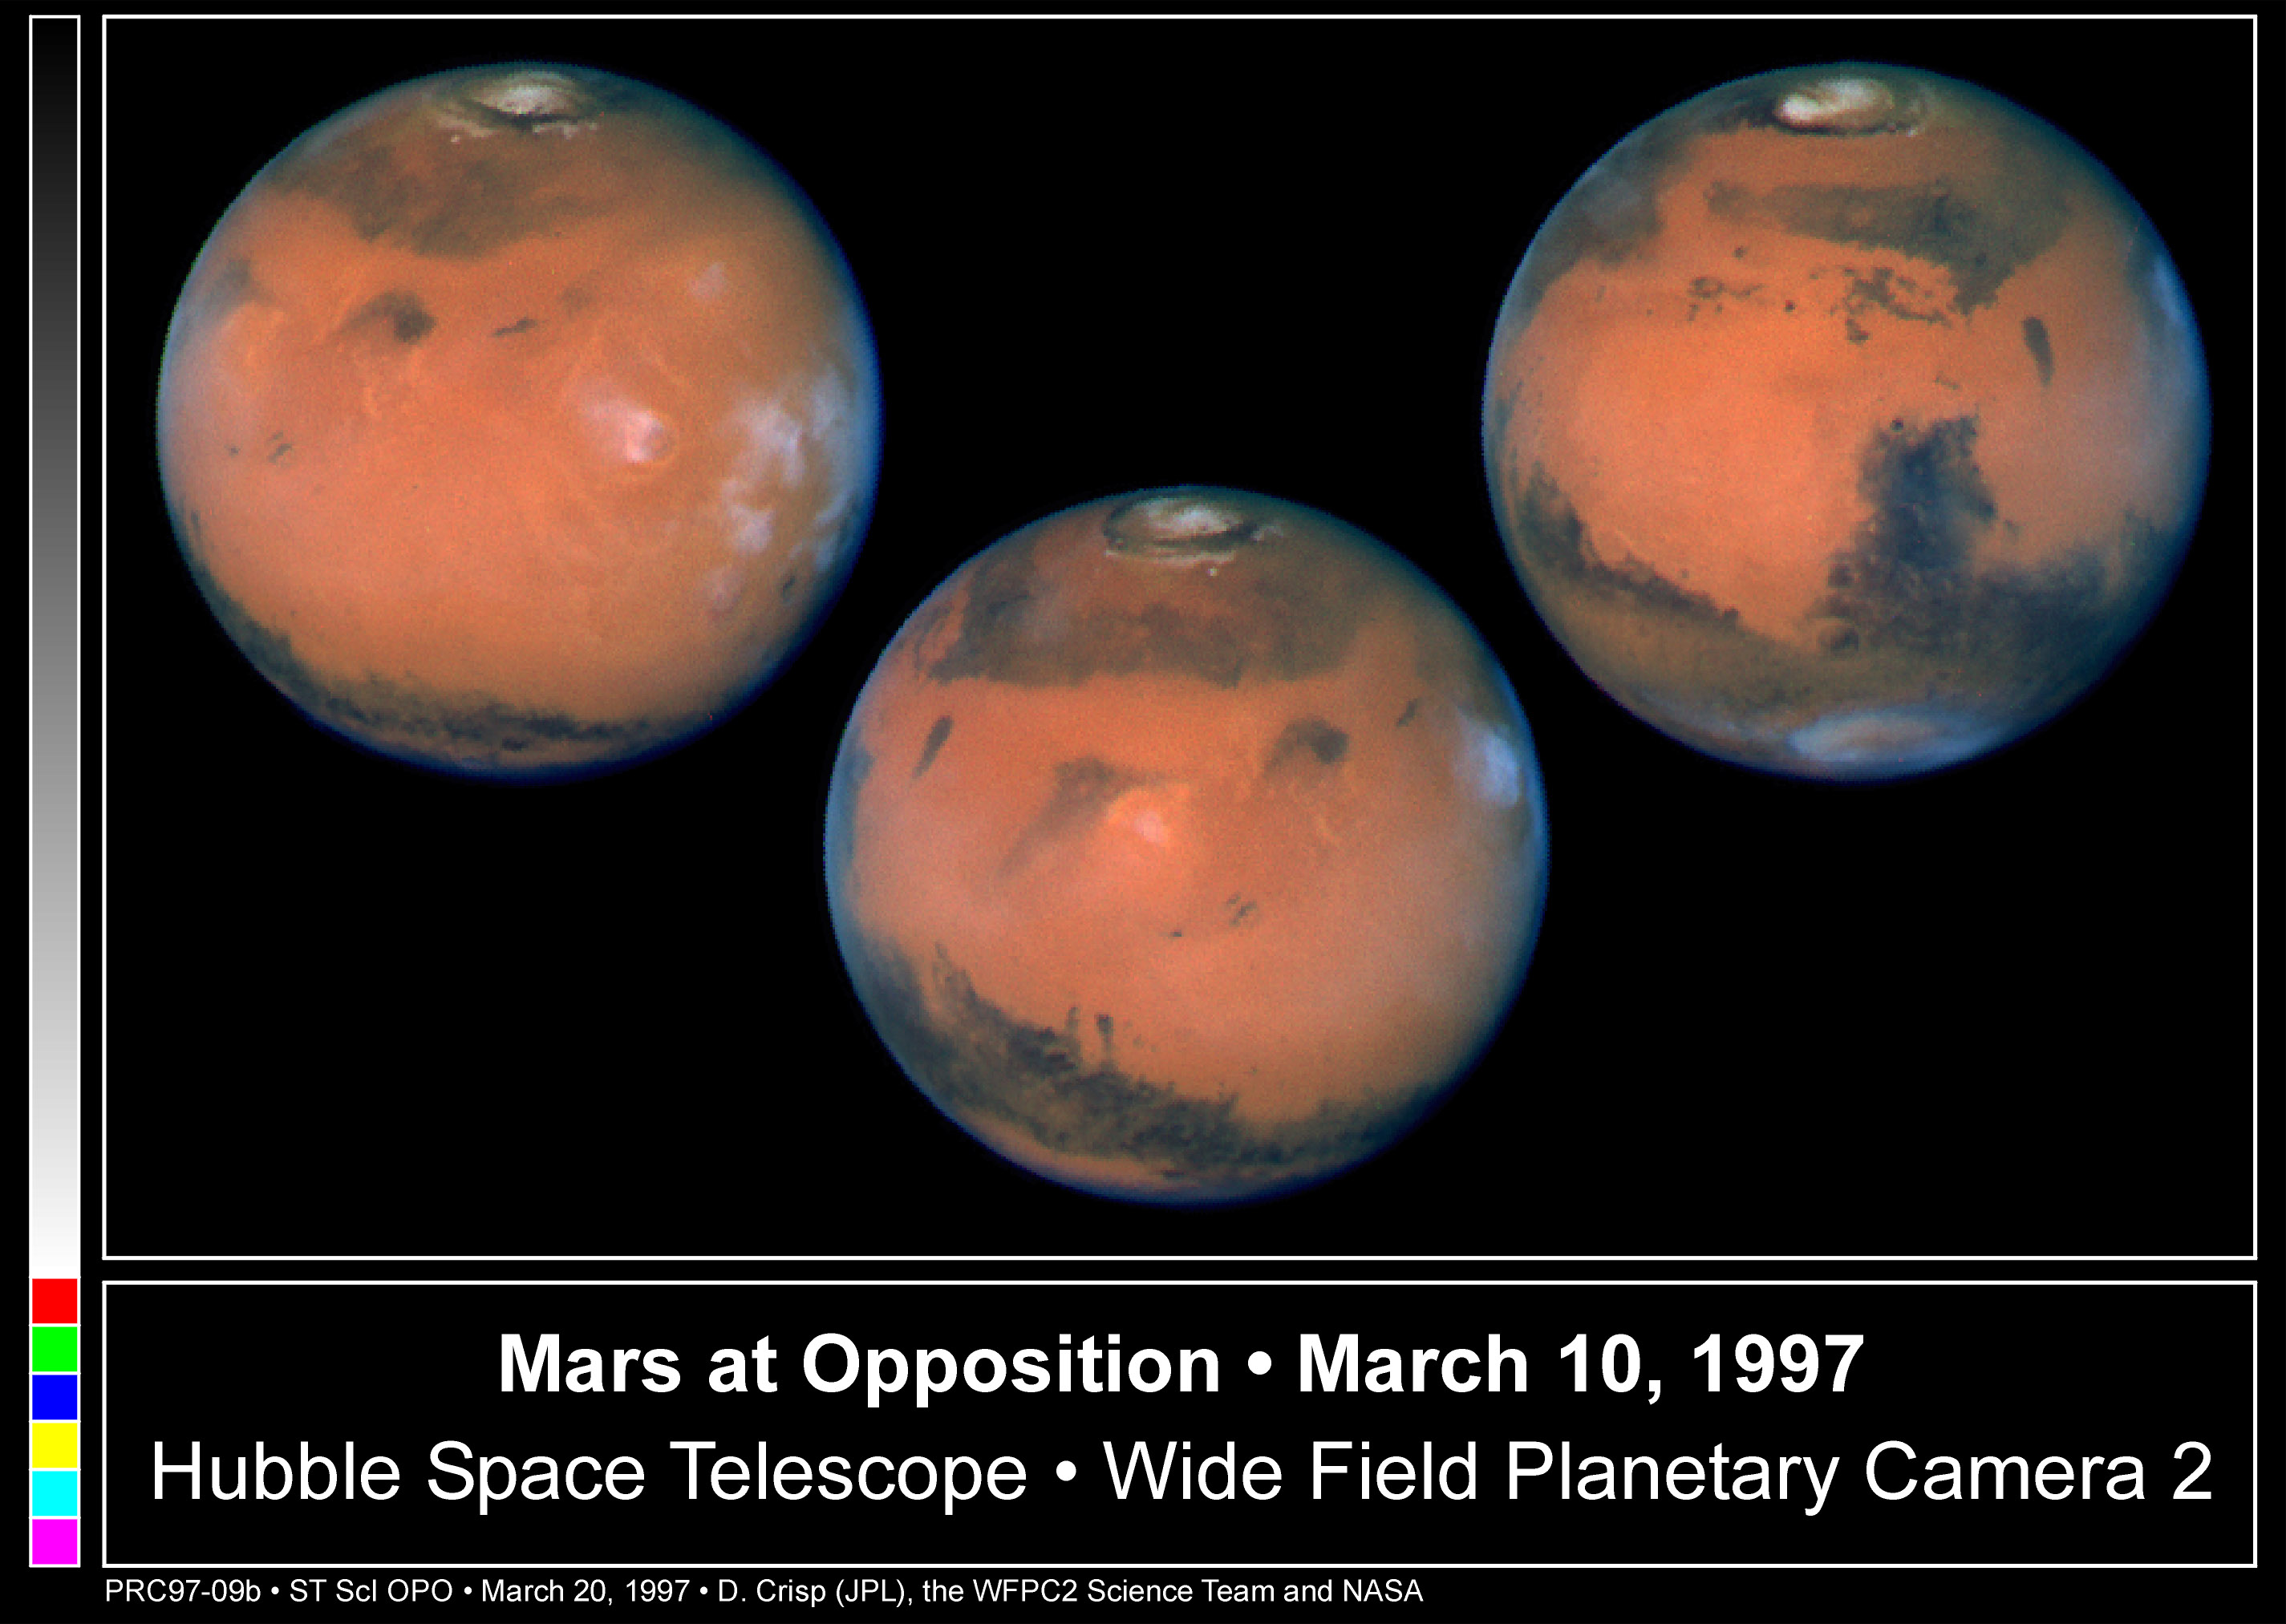

Mars at Opposition

Pictures of the planet Mars taken with the recently refurbished Hubble Space Telescope (HST) will provide the most detailed global view of the red planet ever obtained from Earth.

Credit: David Crisp and the WFPC2 Science Team (Jet Propulsion Laboratory/California Institute of Technology)